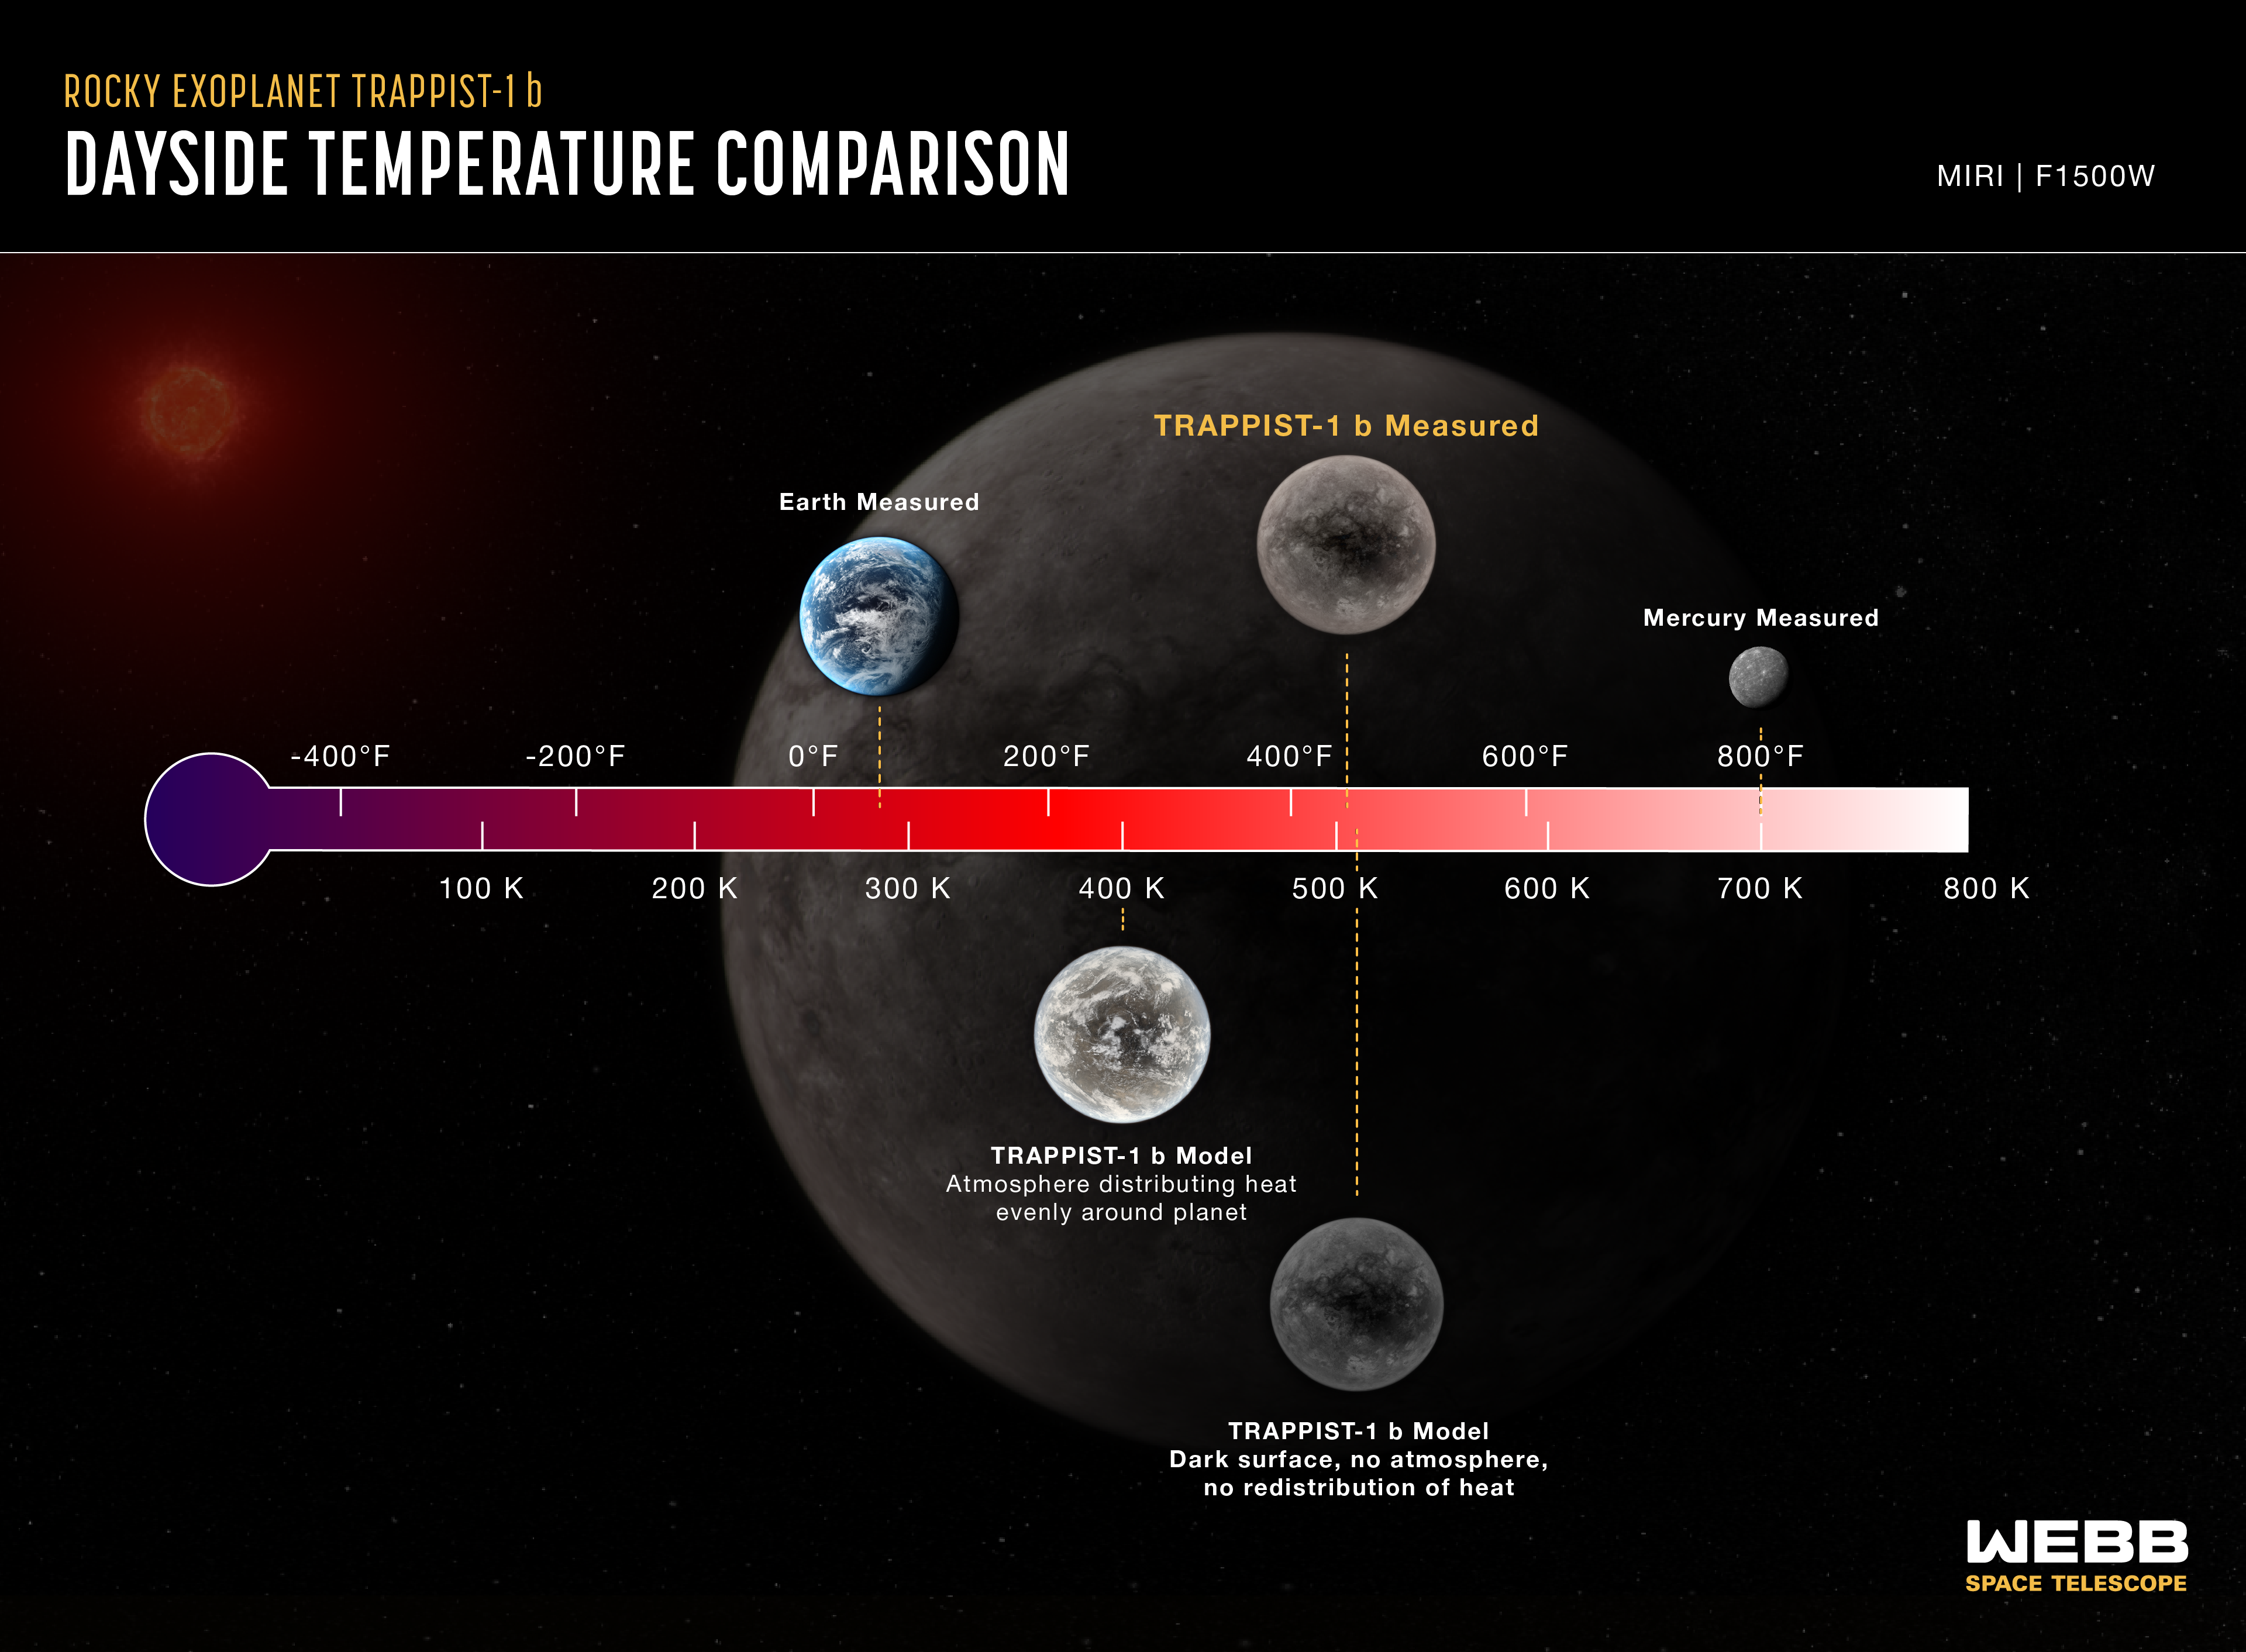

Rocky exoplanet TRAPPIST-1 b (temperature comparison)

Comparison of the dayside temperature of TRAPPIST-1 b as measured using Webb’s Mid-Infrared Instrument (MIRI) to computer models showing what the temperature would be under various conditions. The models take into account the known properties of the system, including the planet’s size and density, the temperature of the star, and the planet’s orbital distance. The temperature of the dayside of Mercury is also shown for reference.

The dayside brightness of TRAPPIST-1 b at 15 microns corresponds to a temperature of about 500 K (roughly 230°C). This is consistent with the temperature assuming the planet is tidally locked (one side facing the star at all times), with a dark-coloured surface, no atmosphere, and no redistribution of heat from the dayside to the nightside.

If the heat energy from the star were distributed evenly around the planet (for example, by a circulating carbon dioxide-free atmosphere), the temperature at 15 microns would be 400 K (125°C). If the atmosphere had a substantial amount of carbon dioxide, it would emit even less 15-micron light and would appear to be even cooler.

Although TRAPPIST-1 b is hot by Earth standards, it is cooler than the dayside of Mercury, which consists of bare rock and no significant atmosphere. Mercury receives about 1.6 times more energy from the Sun than TRAPPIST-1 b does from its star.

MIRI was developed as a partnership between Europe and the USA: the main partners are ESA, a consortium of nationally funded European institutes, the Jet Propulsion Laboratory (JPL) and the University of Arizona. The instrument was nationally funded by the European Consortium under the auspices of the European Space Agency.

Credit: NASA, ESA, CSA, J. Olmsted (STScI), T. P. Greene (NASA Ames), T. Bell (BAERI), E. Ducrot (CEA), P. Lagage (CEA)